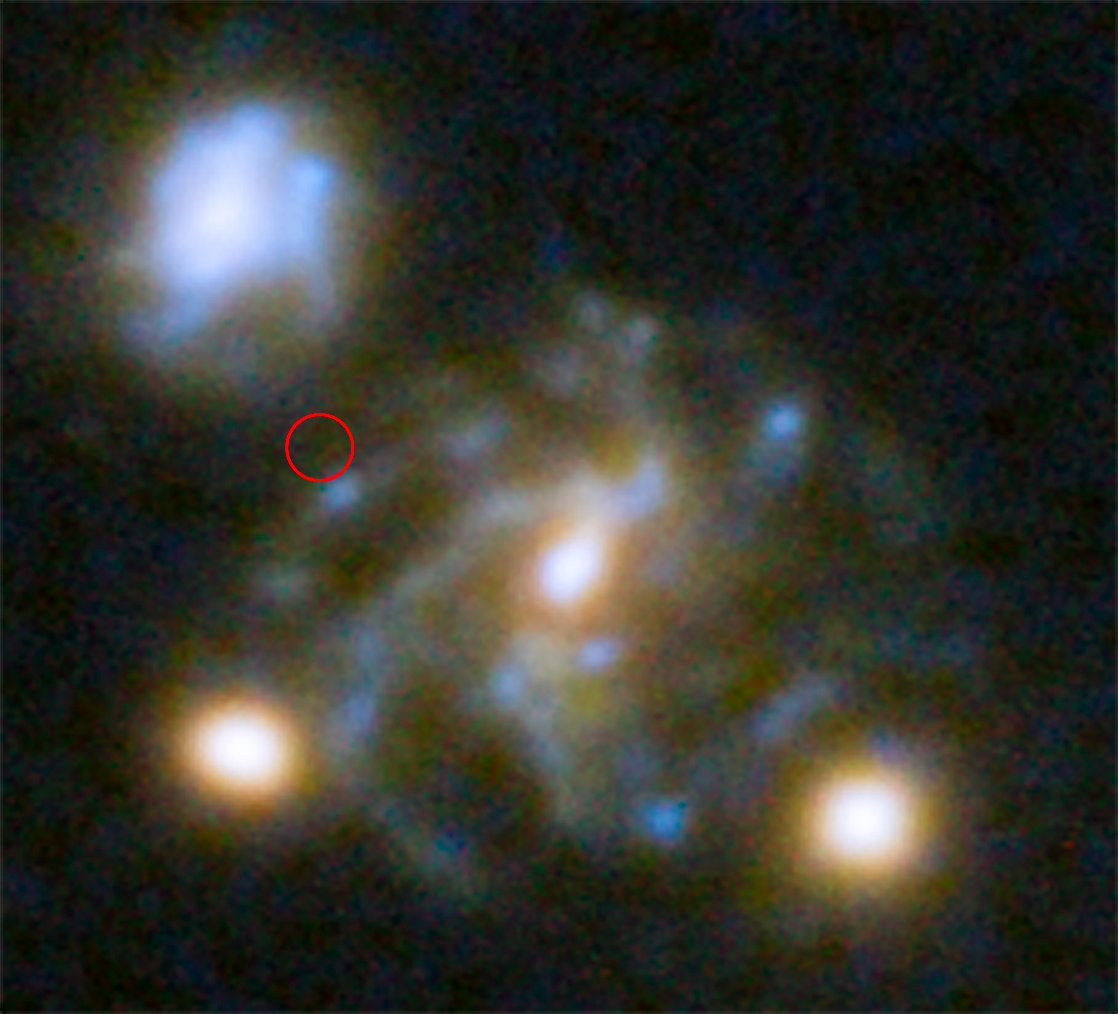

Third image of galaxy hosting most distant known star

The galaxy containing the most distant star known so far is visible three times in the galaxy cluster MACS j1149.5+223. The multiple images are created through the process of strong gravitational lensing.

While two of the images of the galaxy are close to the centre of the galaxy cluster, this third image is farther out and almost undistorted.

Credit: NASA, ESA, S. Rodney (John Hopkins University, USA) and the FrontierSN team; T. Treu (University of California Los Angeles, USA), P. Kelly (University of California Berkeley, USA) and the GLASS team; J. Lotz (STScI) and the Frontier Fields team; M. Postman (STScI) and the CLASH team; and Z. Levay (STScI)